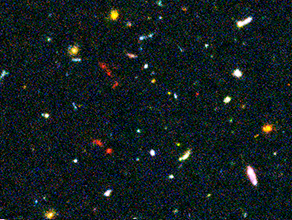

Hubble Ultra Deep Field Most-Distant Galaxy Candidates - Close-up 2

This image of the Hubble Ultra Deep Field (HUDF) — a small region of sky in the direction of the southern constellation Fornax — shows some of the earliest star-forming galaxies in the Universe.

The sensitivity of Hubble's Advanced Camera for Surveys (ACS), combined with the penetrating power of the Near Infrared Camera and Multi-Object Spectrometer (NICMOS) have finally revealed these long-sought after faint galaxies. Some of these faint objects are less than one four-billionth the brightness of stars that can be seen with the naked eye and their light has taken nearly 13 billion years to reach Earth.

Credit: NASA, ESA, R. Windhorst (Arizona State University) and H. Yan (Spitzer Science Center, Caltech)